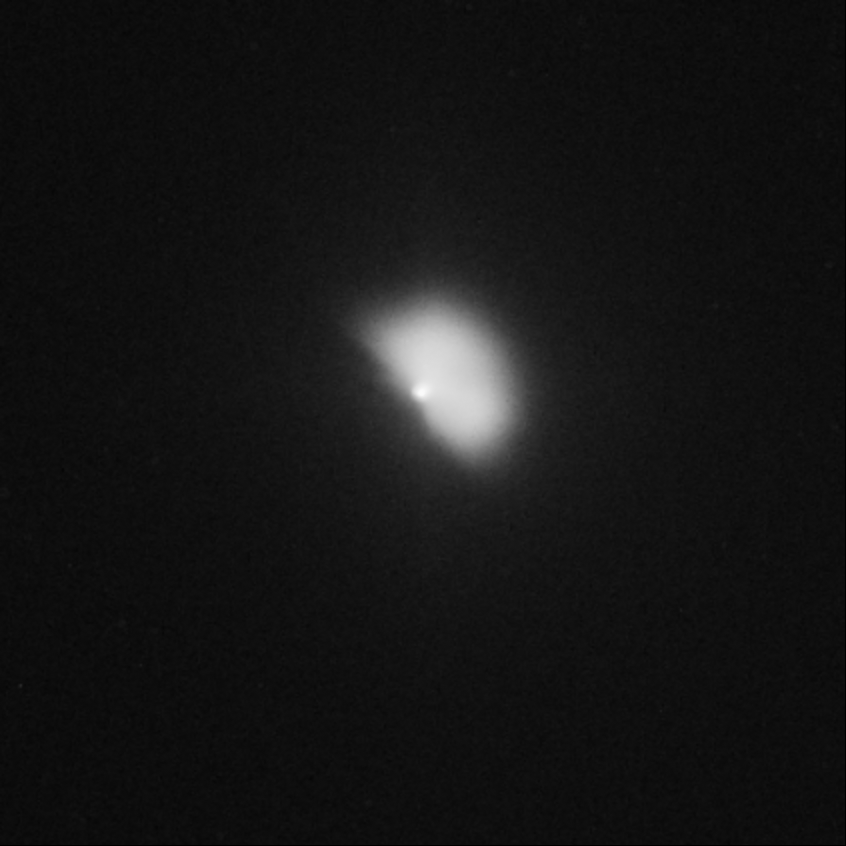

Hubble captures Deep Impact's collision with a comet (view 64 minutes after impact)

The Hubble telescope continued to monitor the comet, snapping another image an hour after the encounter. In this photo, the dust ejected during the impact is expanding outward in the shape of a fan. The debris extends about 720 kilometres from the nucleus.

Credit: NASA, ESA, P. Feldman (Johns Hopkins University), and H. Weaver (Johns Hopkins University Applied Physics Lab)